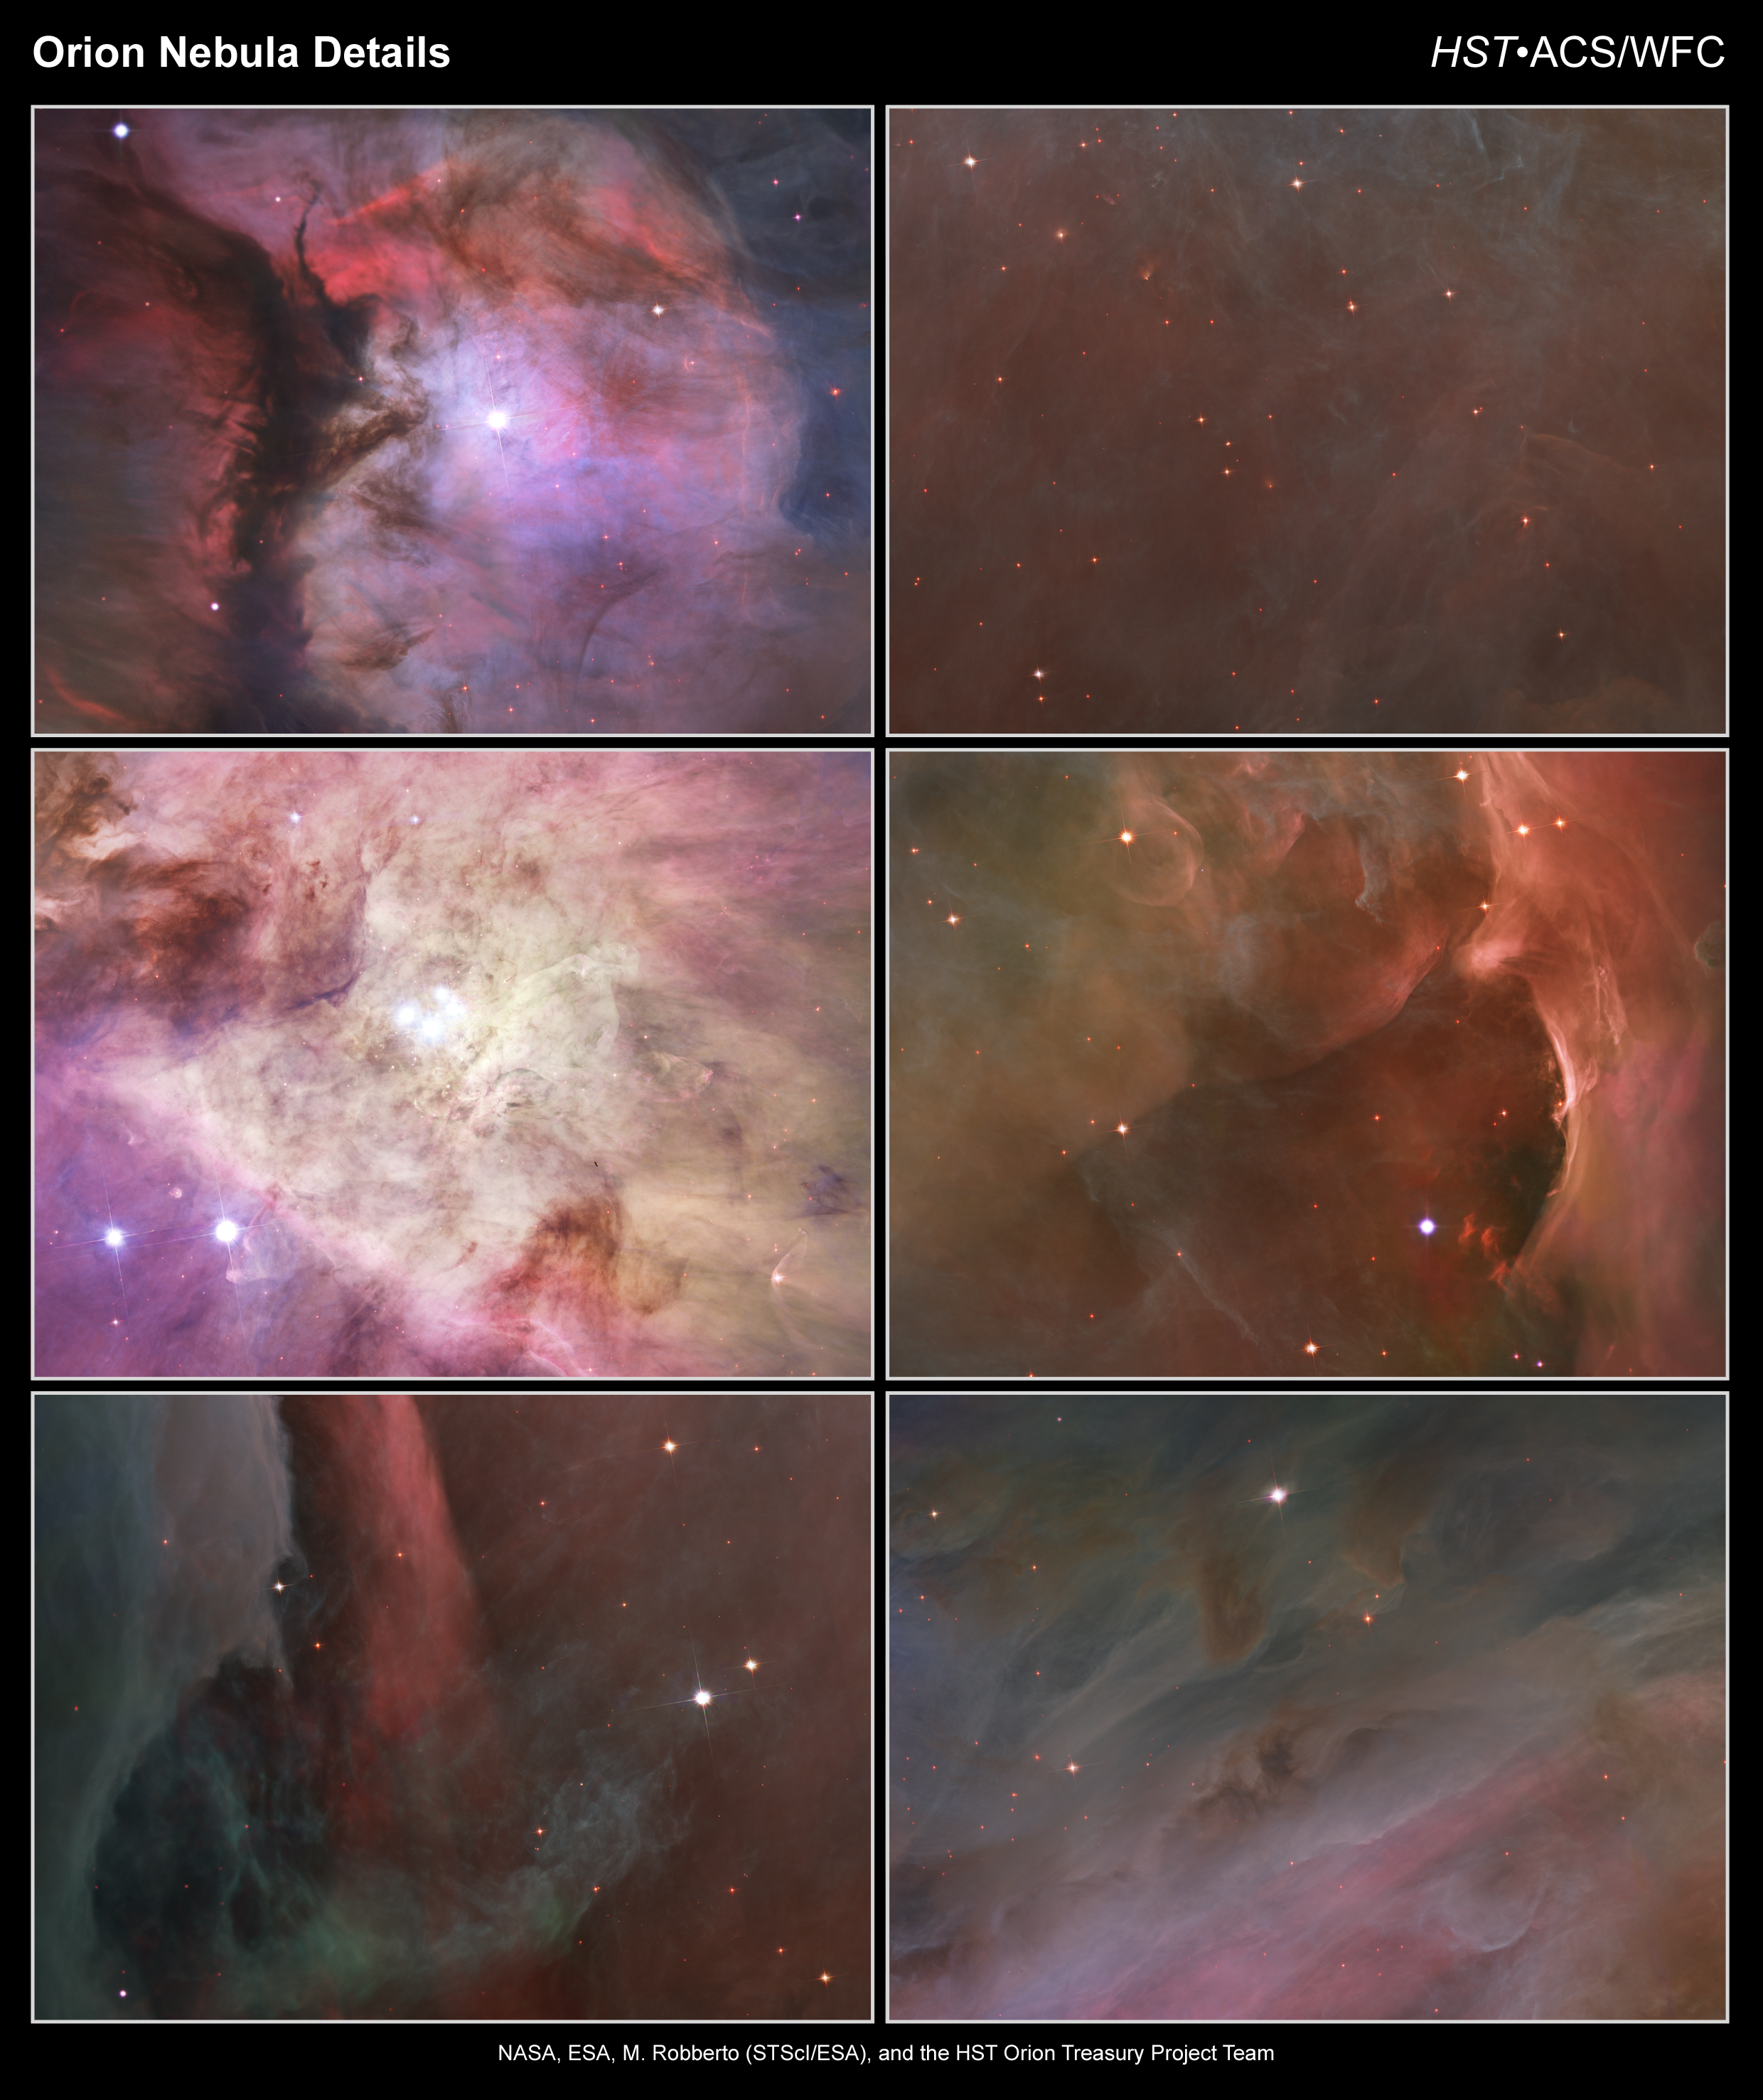

Close-up images of the Orion Nebula

These are six views of the Orion Nebula which pinpoint some of the region's most interesting features.

Orion in miniature [top left]

A massive star is illuminating this small region, called M43, and sculpting the landscape of dust and gas. Astronomers call the area a miniature Orion Nebula because of its small size and the single star that is shaping it. The Orion Nebula itself is much larger and has four hefty stars that are carving the dust-and-gas terrain.

The Orion Nebula's biggest stars [middle left]

Packed into the centre of this region are bright lights of the Trapezium stars, the four heftiest stars in the Orion Nebula. Ultraviolet light unleashed by these stars is carving a cavity in the nebula and disrupting the growth of hundreds of smaller stars. The dark speck near the bottom, right of the image is a silhouette of an edge-on disk encircling a young star. Another whitish-looking disk is visible near the bottom, left, just above the two bright stars. This disk is encased in a bubble of gas and dust.

Over the edge [bottom left]

This dark red column shows an illuminated edge of the cavity wall.

Failing stars [top right]

The faint red stars in this close-up image are the myriad brown dwarfs that Hubble spied for the first time in the Orion Nebula in visible light. Sometimes called "failed stars" brown dwarfs are cool objects that are too small to be ordinary stars because they cannot sustain nuclear fusion in their cores the way our Sun does.

Sculpting the landscape [middle right]

This glowing region reveals arcs and bubbles formed when stellar winds - streams of charged particles ejected by the Trapezium stars - collide with material.

Pillars of gas [bottom right]

These dense, dark pillars of dust and gas are resisting erosion from intense ultraviolet light released by the Orion Nebula's biggest stars.

Credit: NASA, ESA, M. Robberto ( Space Telescope Science Institute/ESA) and the Hubble Space Telescope Orion Treasury Project Team